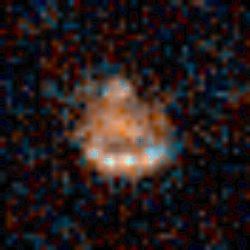

Medium Deep Survey Galaxy

Image of a normal spiral galaxy taken by the Wide Field Planetary Camera 2 (WFPC2) installed on the Hubble Space Telescope (HST). The object is estimated to be at a distance of 5 to 7 billion light-years from Earth.

Credit: Richard Griffiths (JHU) and NASA